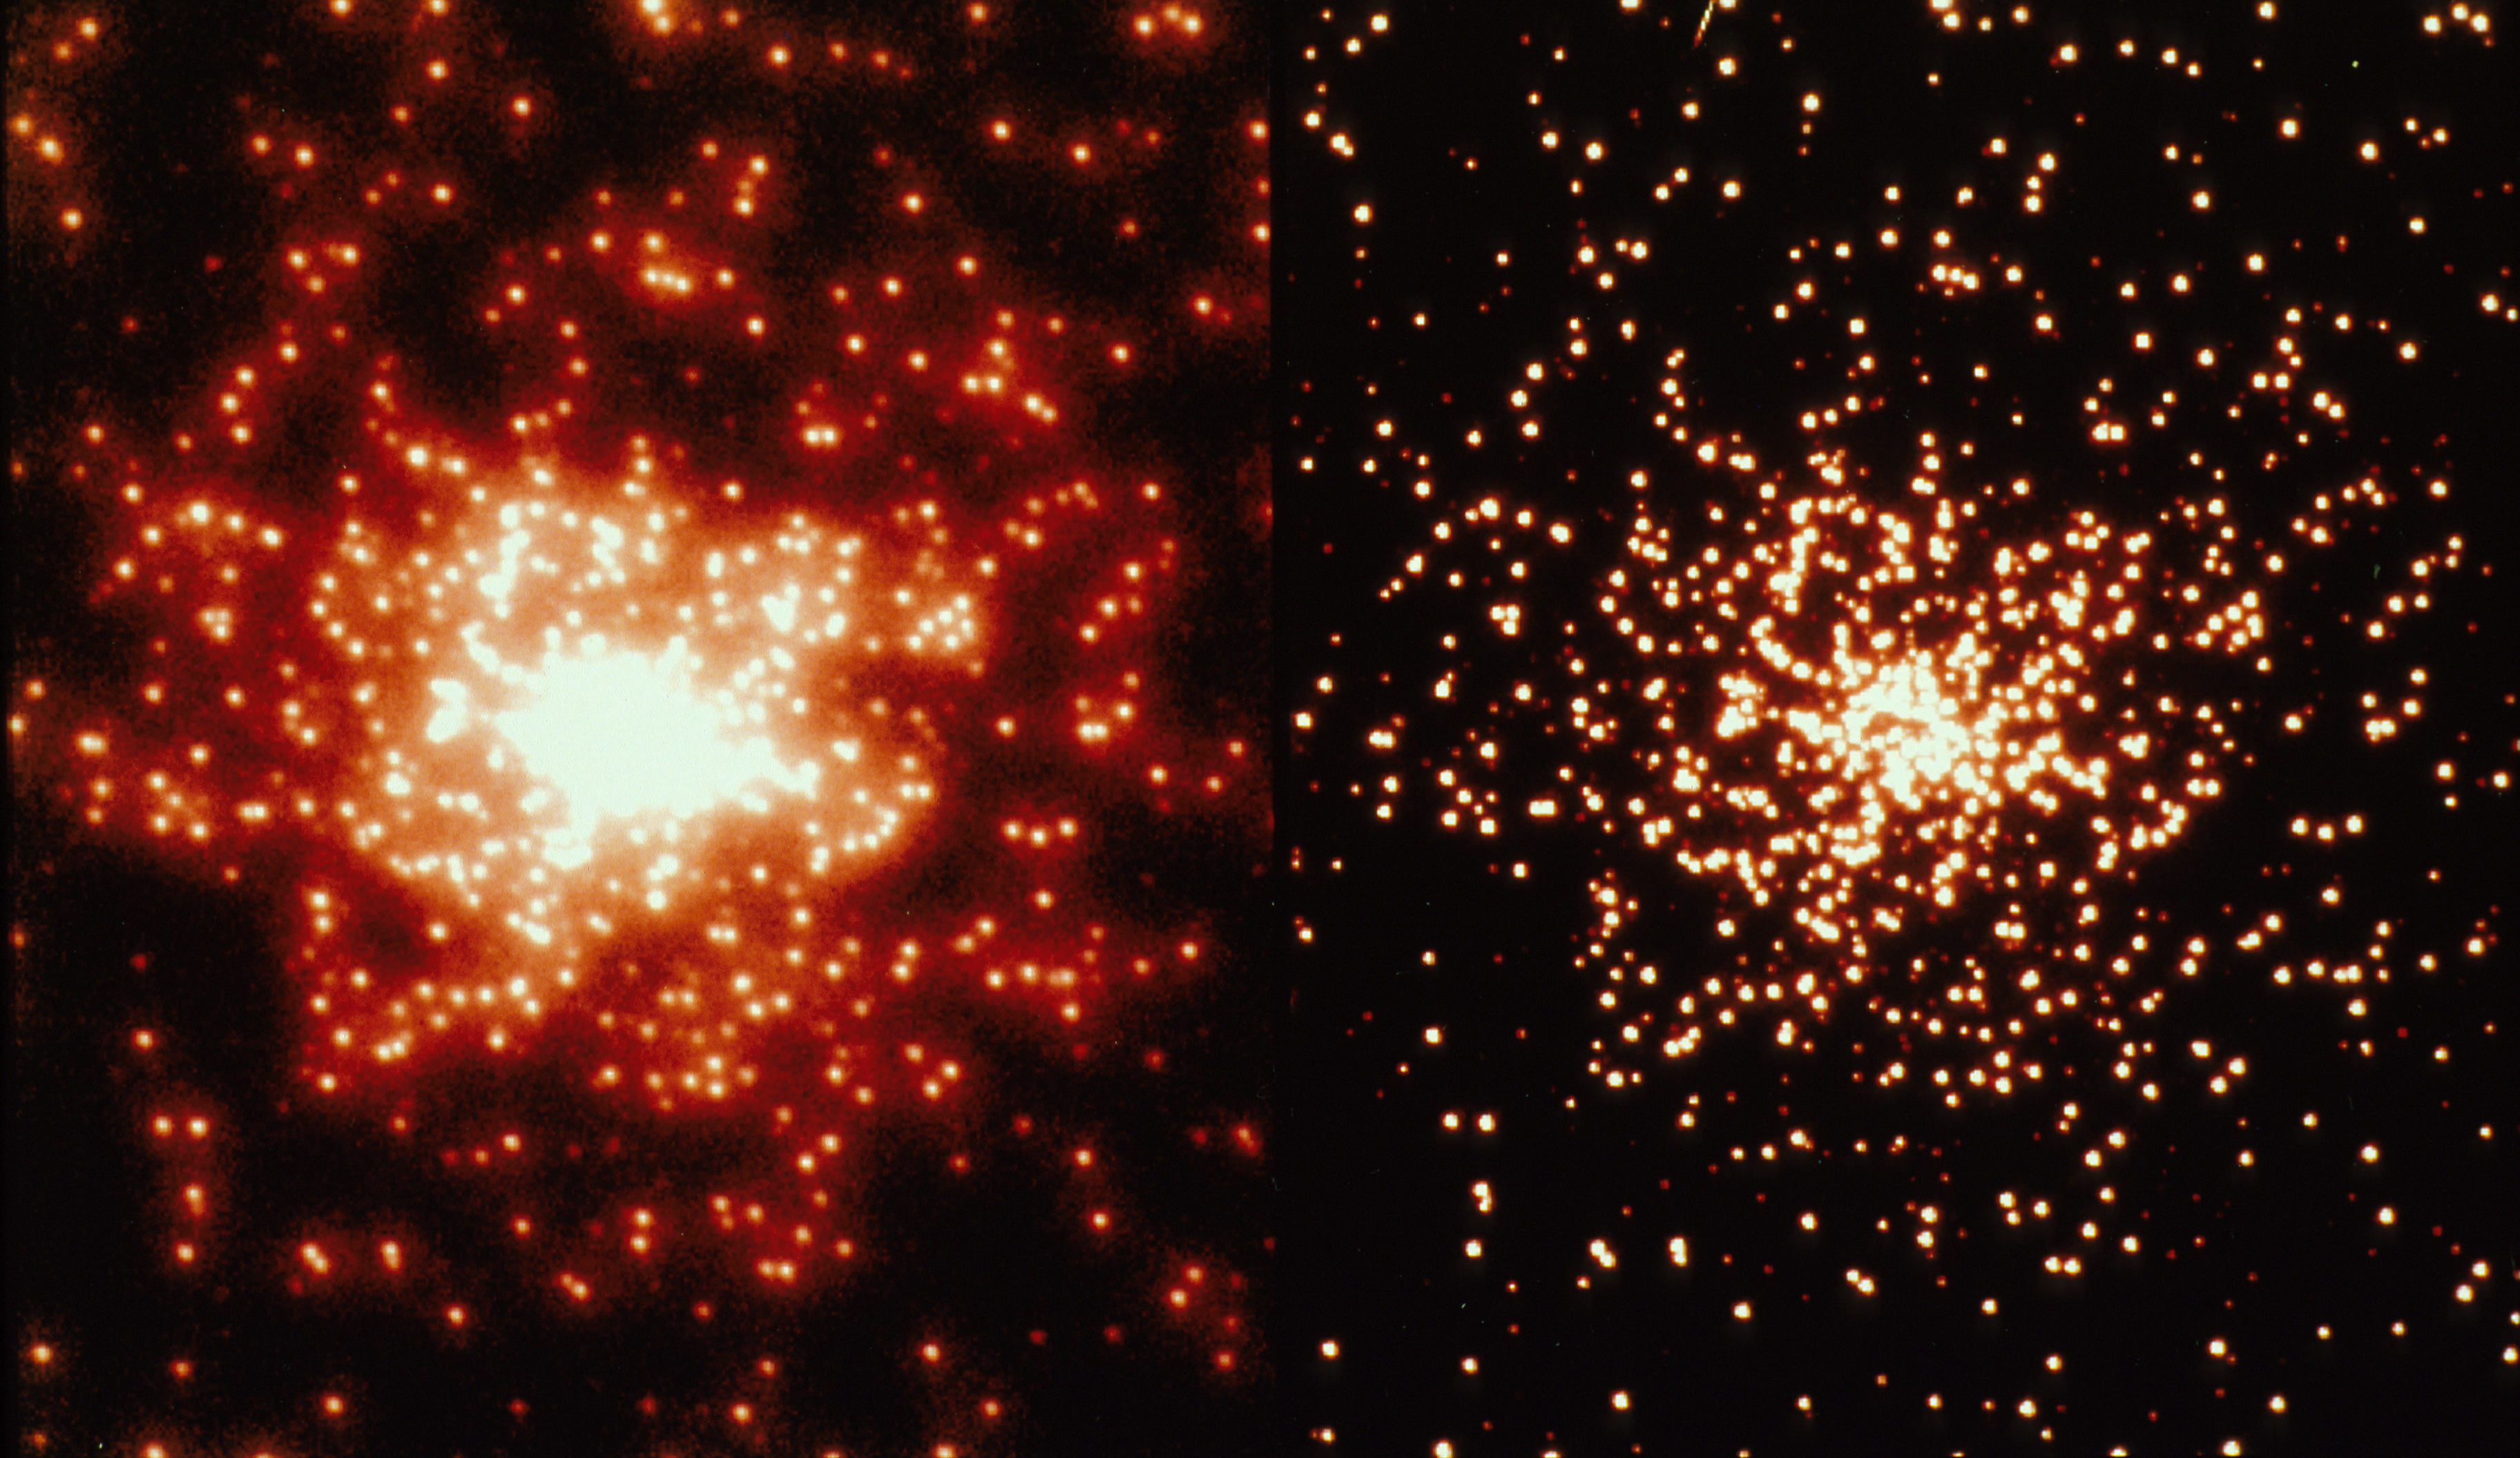

Comparison of a WFPC2 thermal vacuum globular cluster-mask image to WFPC1

Right panel: Real image taken with the Wide Field/Planetary Camera-2 of a "globular duster" pinhole mask in the April 1993 WFPC2 Thermal Vacuum test at JPL (Pasadena, CA). The image is a 80 sec exposure through the F555W ("V") filter about 40x34" on a side, and approximates closely what HST+WFPC2 should see in a few-orbit exposure after refurbishment on a distant globular cluster (like Omega Centauri, but up to 70x further away). This HST image has a resolution of ~0.10 (FWHM), or about 10x sharper than can be ordinarily achieved from the ground. Note the apparent lack of spherical aberration wings in the expected refurbished HST image, and that individual stars can now be distinguished for the first time down to the very cluster center. The faint cosmic-ray streak in the middle of the left edge shows that this is a real (WFPC2) CCD-image.

Left panel: Simulation of the same globular cluster as in the right panel (shown at the same intensity scale), but as it would have appeared to WFPC-1 before HST's refurbishment. Note that most of the stars in the cluster center cannot be separated because of the spherical aberration wings in the pre-refurbishment HST images, and that all the faintest stars in the cluster outskirts have disappeared, because of spherical aberration and the higher read-noise in WFPC1. Note how similar this image is when compared to a real WFPC1 observation of the Galactic globular cluster M15 (see Lauer et al. 1991, Astrophysical Journal 369, Letter 45, Plate L11 and L12). Both show a central diffuse halo of starlight from HST's spherical aberration wings and a lack of faint stars.

Credit: Dr. J. Jeff Hester of Arizona State University, and the Wide Field Planetary Camera-2 Instrument Definition Team (P.1.: Dr. John Trauger at JPL), and was sponsored by NASA/ESA/GSFC.